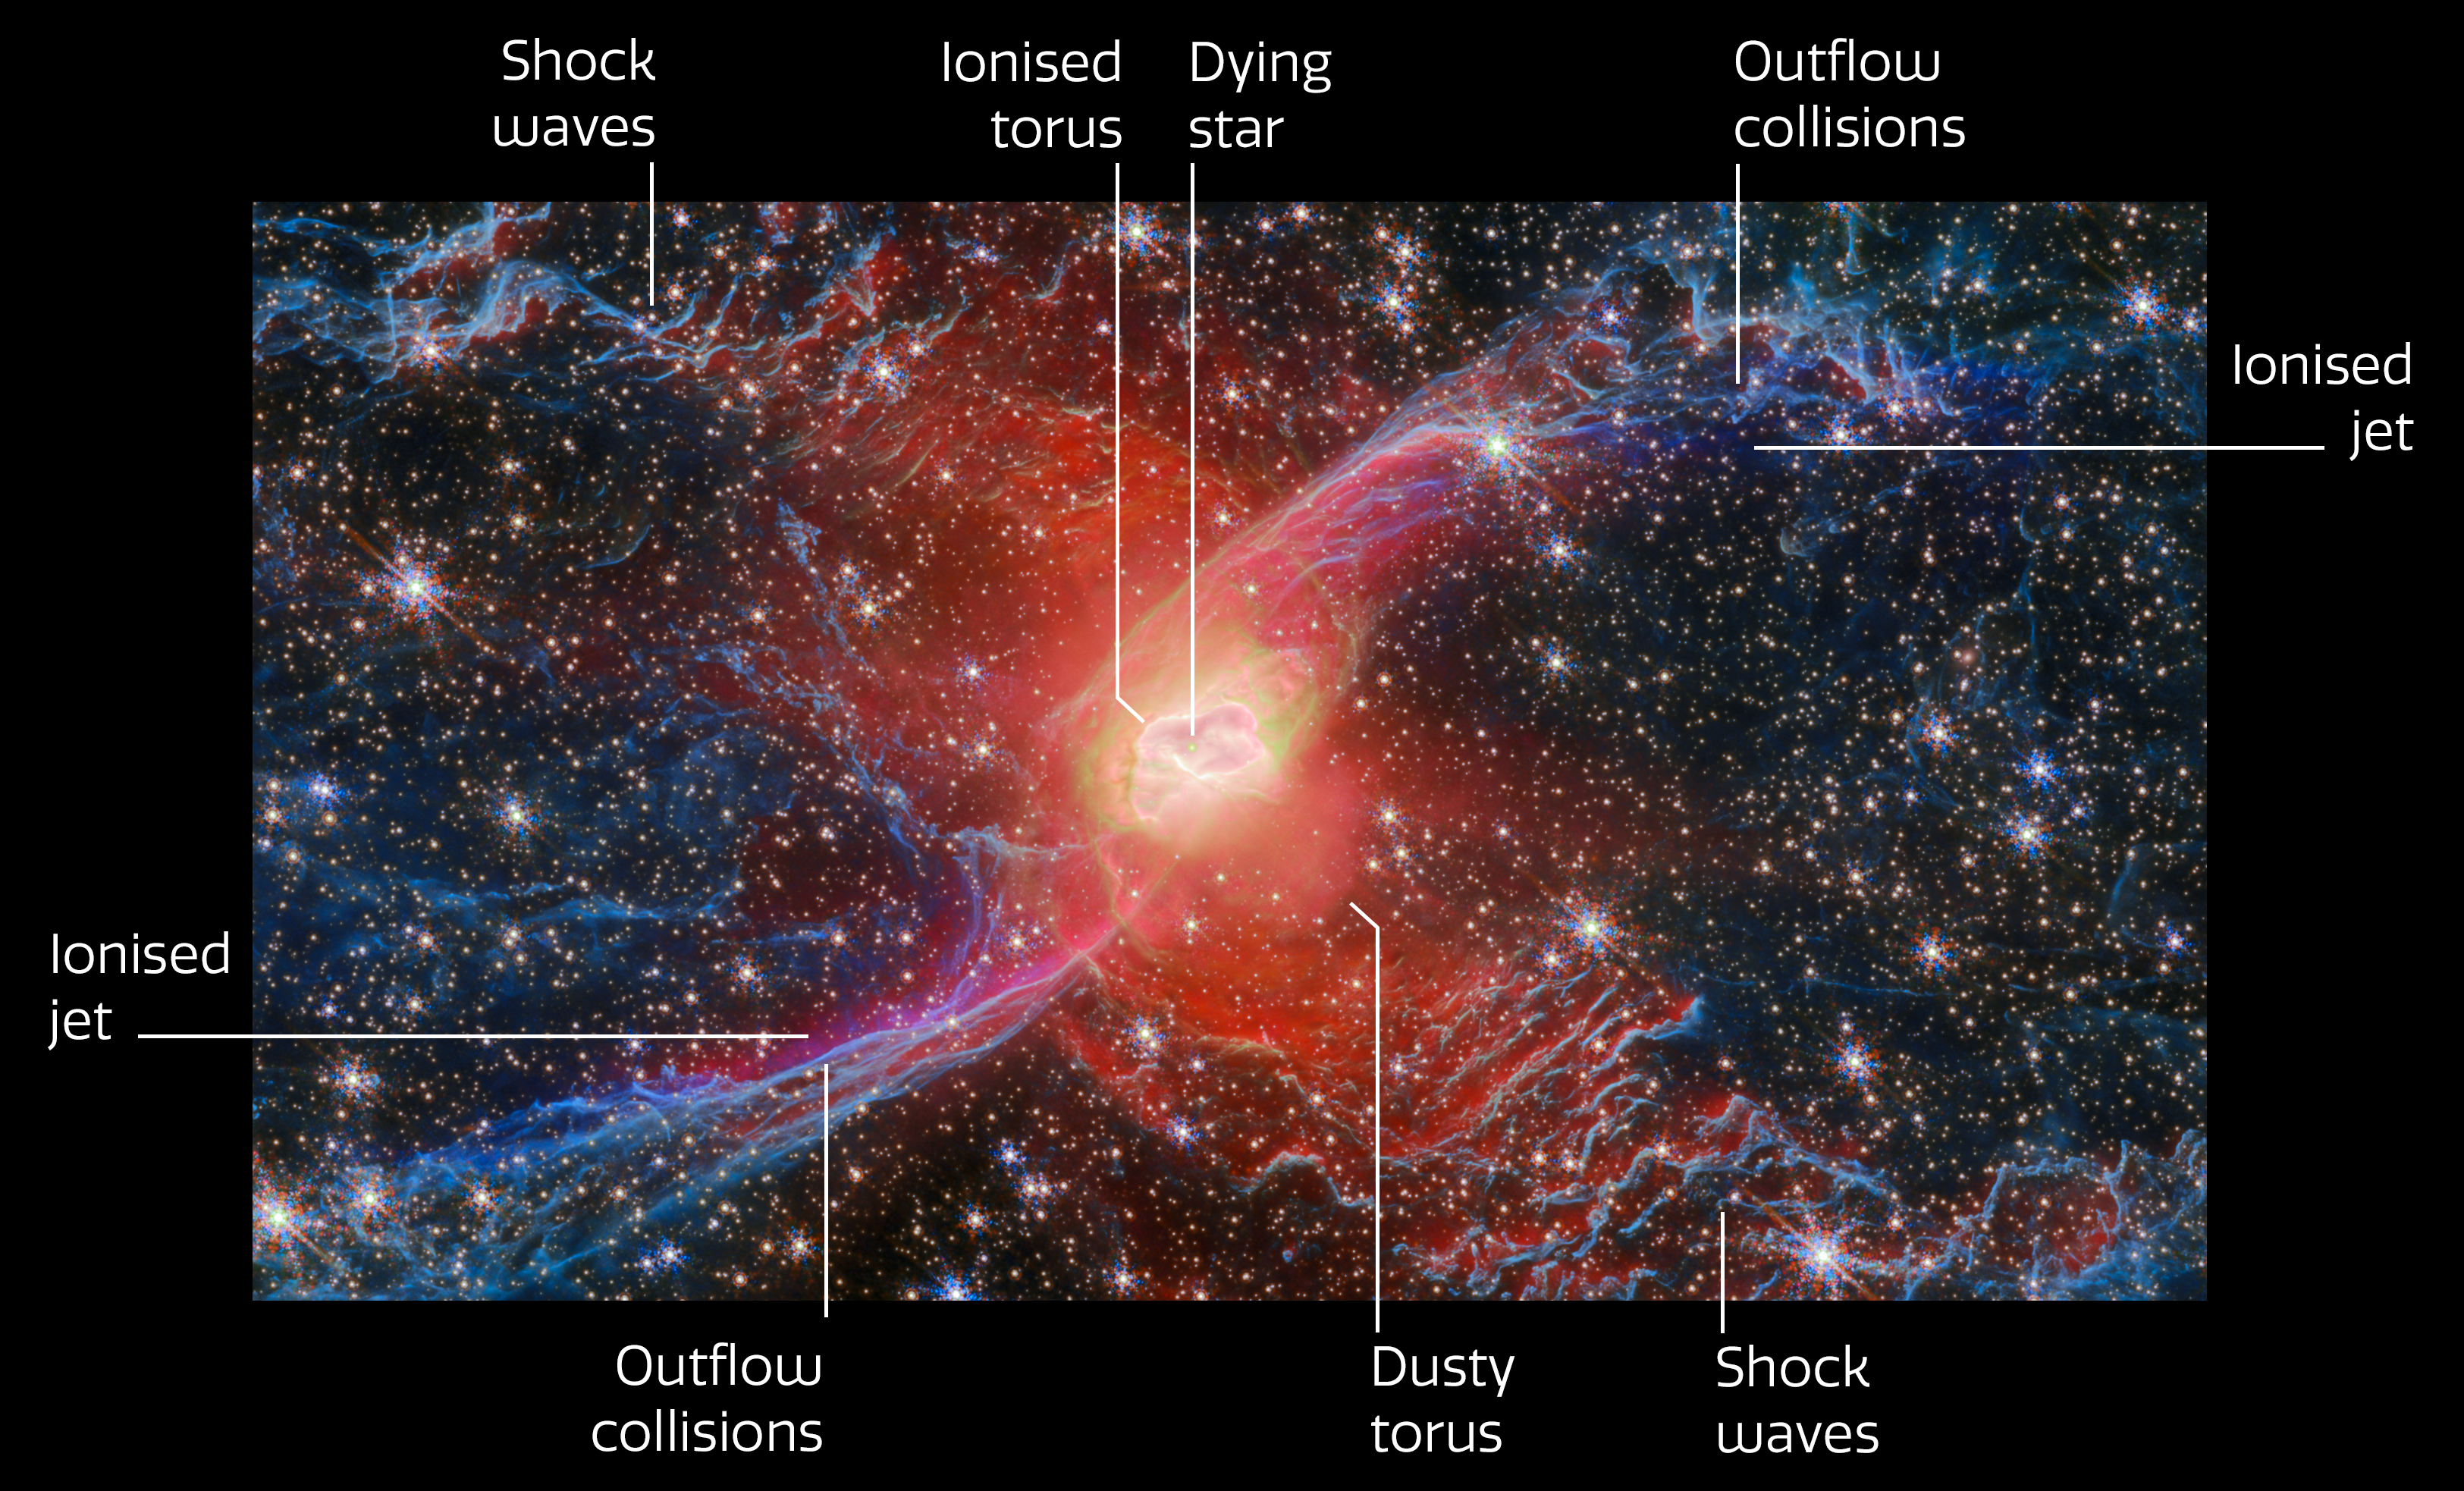

Red Spider Nebula, NGC 6537 (annotated)

This new annotated NASA/ESA/CSA James Webb Space Telescope Picture of the Month features a cosmic creepy-crawly called NGC 6537 — the Red Spider Nebula. Using its Near-InfraRed Camera (NIRCam), Webb has revealed never-before-seen details in this picturesque planetary nebula with a rich backdrop of thousands of stars.

Planetary nebulae like the Red Spider Nebula form when ordinary stars like the Sun reach the end of their lives. After ballooning into cool red giants, these stars shed their outer layers and cast them into space, exposing their white-hot cores. Ultraviolet light from the central star ionises the cast-off material, causing it to glow. The planetary nebula phase of a star’s life is as fleeting as it is beautiful, lasting only a few tens of thousands of years.

Starting at the centre, this image indicates the location of the planetary nebula’s central star, which has a scorching temperature of 160 000 K. Surrounding this dying star is a doughnut-shaped torus of gas and dust, the innermost portion of which has been ionised by the fierce ultraviolet radiation from the superheated central star. The remainder of the torus, farther from the star, is much colder and is slowly expanding outward.

The rumpled appearance of the gas that forms the spider’s ‘legs’ comes from the interaction between outflows that emerge from opposite sides of the star and material that is swept up by the outflowing gas, creating shock waves. Webb’s view reveals for the first time the full extent of the nebula’s outstretched lobes.

These lobes, shown in blue, are traced by light emitted from H2 molecules, which contain two hydrogen atoms bonded together. Stretching over the entirety of NIRCam’s field of view, these lobes are shown to be closed, bubble-like structures that each extend about 3 light-years. Outflowing gas from the centre of the nebula has inflated these massive bubbles over thousands of years.

Tracing out an elongated purple ‘S’ shape, ionised iron atoms mark where a jet has emerged from the vicinity of the central star and collided with material that was cast off by the star previously.

The observations used to create this image come from Webb GO programme #4571 (PI: J. Kastner) as part of a joint Chandra-JWST observing programme, which aims to understand how bipolar planetary nebulae like the Red Spider Nebula are shaped by the outflows and jets that emerge from the stars at their cores..

Credit: ESA/Webb, NASA & CSA, J. H. Kastner (Rochester Institute of Technology)